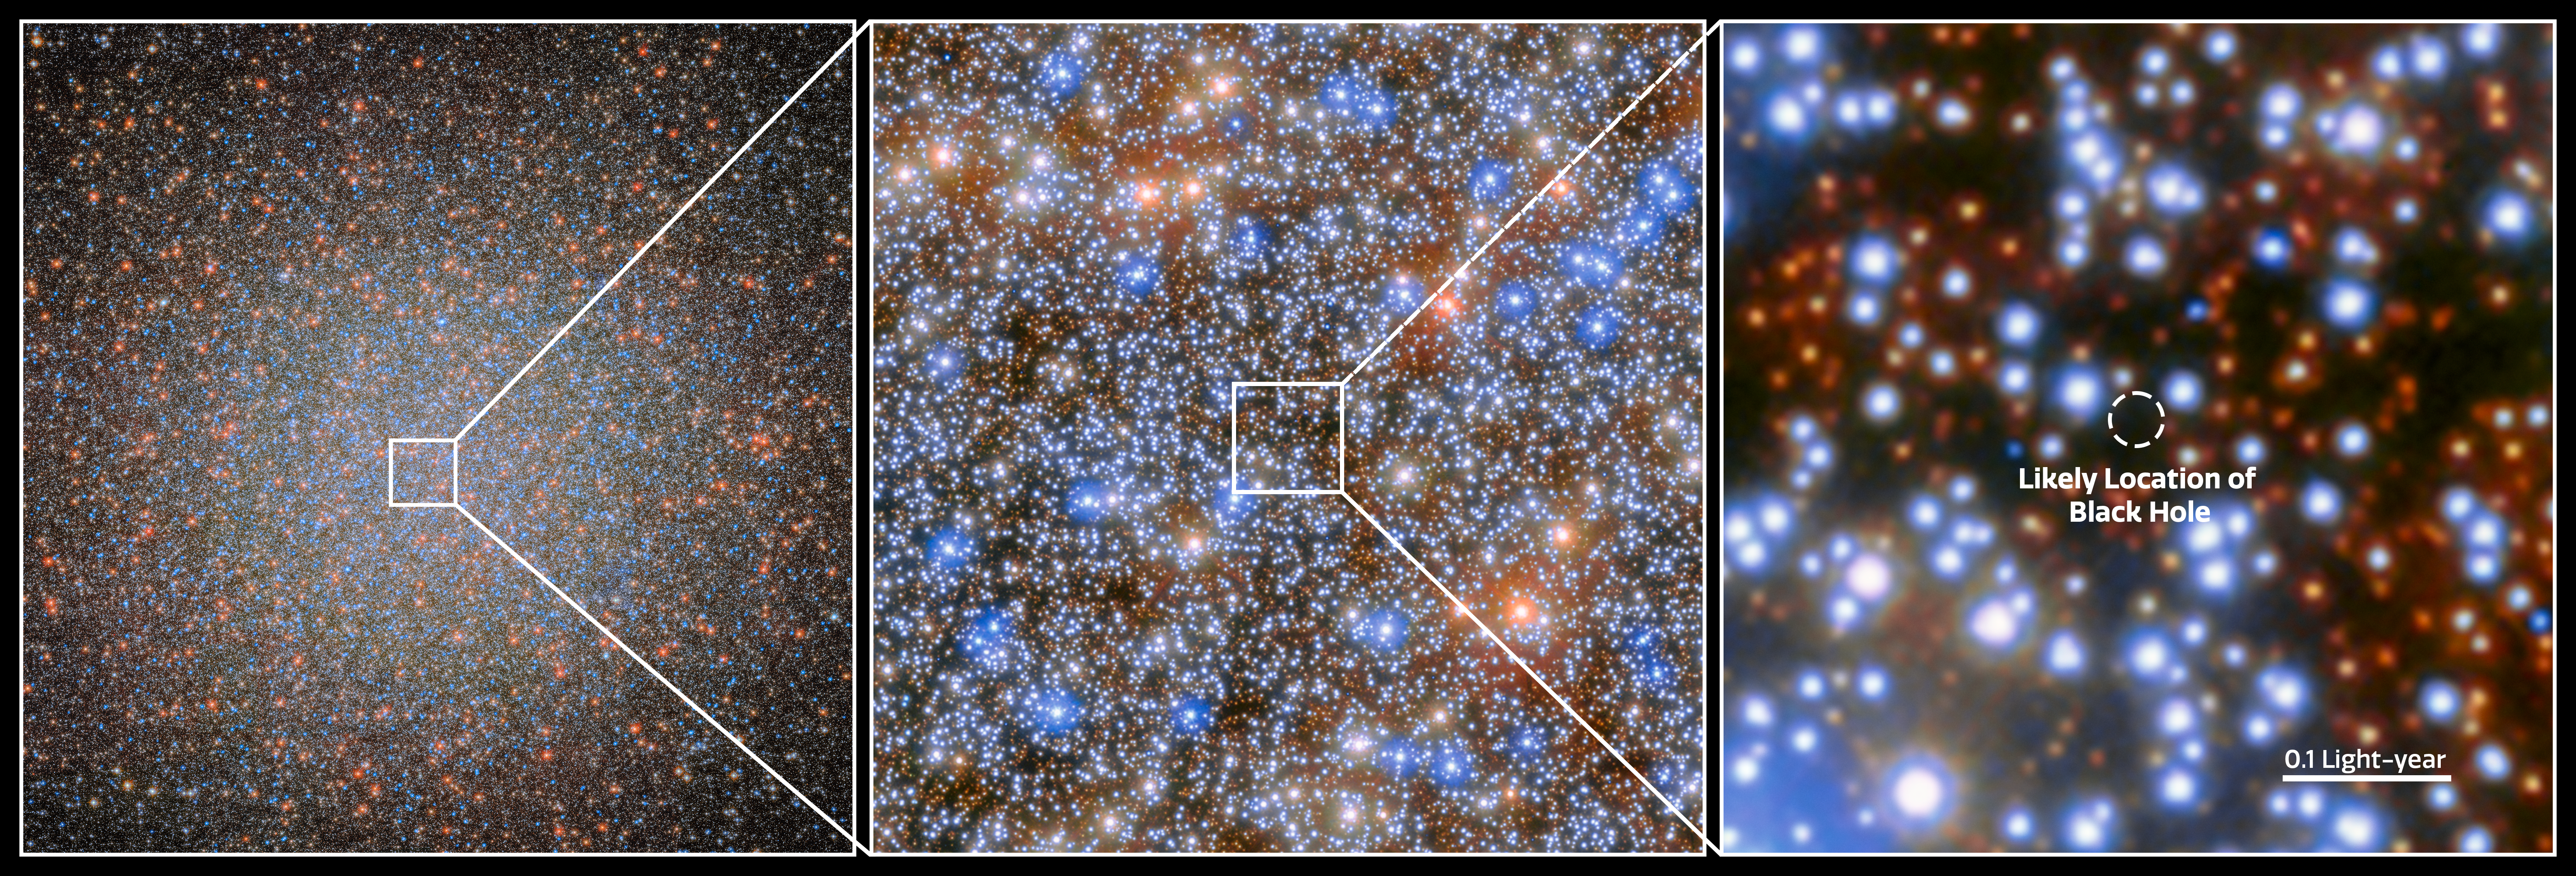

IMBH candidate in Omega Centauri

An international team of astronomers has used more than 500 images from the NASA/ESA Hubble Space Telescope spanning two decades to detect seven fast-moving stars in the innermost region of Omega Centauri, the largest and brightest globular cluster in the sky. These stars provide compelling new evidence for the presence of an intermediate-mass black hole (IMBH).

This image shows the location of the IMBH in Omega Centauri. If confirmed, at its distance of 17 700 light-years the candidate black hole resides closer to Earth than the 4.3 million solar mass black hole in the centre of the Milky Way, which is 26 000 light-years away. Besides the Galactic centre, it would also be the only known case of a number of stars closely bound to a massive black hole.

Credit: ESA/Hubble & NASA, M. Häberle (MPIA)